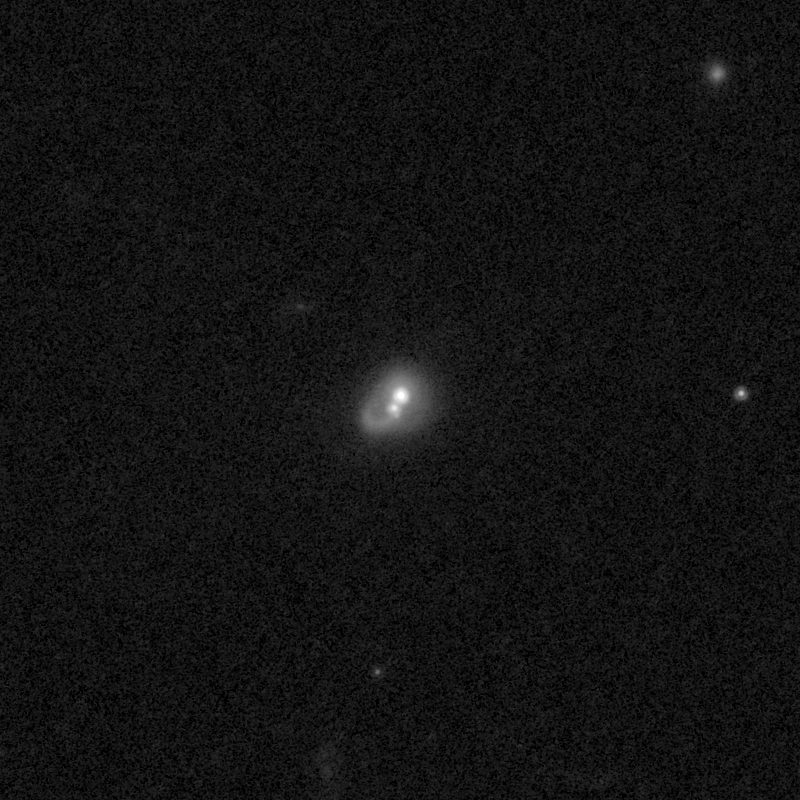

Outflows from merging galaxy J1713+2817

This NASA/ESA Hubble Space Telescope image of the galaxy J1713+2817 shows it is undergoing a firestorm of star birth, as shown by its bright white cores.

This star-making frenzy was ignited by mergers with other galaxies. The odd shape of the galaxy is telltale evidence of a close encounters.

The new Hubble Wide Field Camera 3 observations of this and eleven other galaxies undergoing the same process suggest that energy from the star-birthing frenzies created powerful winds that are blowing out the gas, meaning it is not available to form future generations of stars.

This activity occurred when the Universe was half its current age of 13.7 billion years. The gas-poor galaxies may eventually become so-called red and dead galaxies, composed only of aging stars.

This Hubble false-colour image was processed to bring out important details in the galaxy. The images were taken in 2010.

Credit: NASA, ESA, and P. Sell (Texas Tech University)